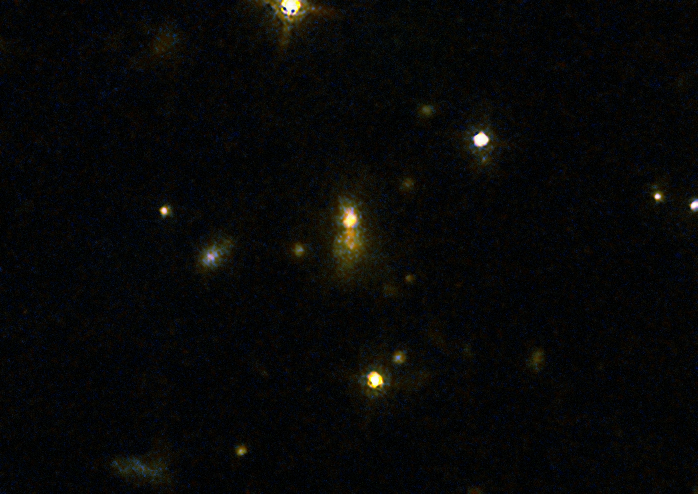

Radio galaxy 3C 454.1

This image taken with the NASA/ESA Hubble Space Telescope shows the galaxy 3C 454.1 which was part of a large survey of galaxies.

The survey confirmed the link between mergers and galaxies hosting jets travelling near the speed of light from supermassive black holes. These galaxies have very strong emissions at radio wavelengths implying that the supermassive black holes they host are feeding huge outflows of plasma.

Credit: NASA, ESA, M. Chiaberge (STScI)